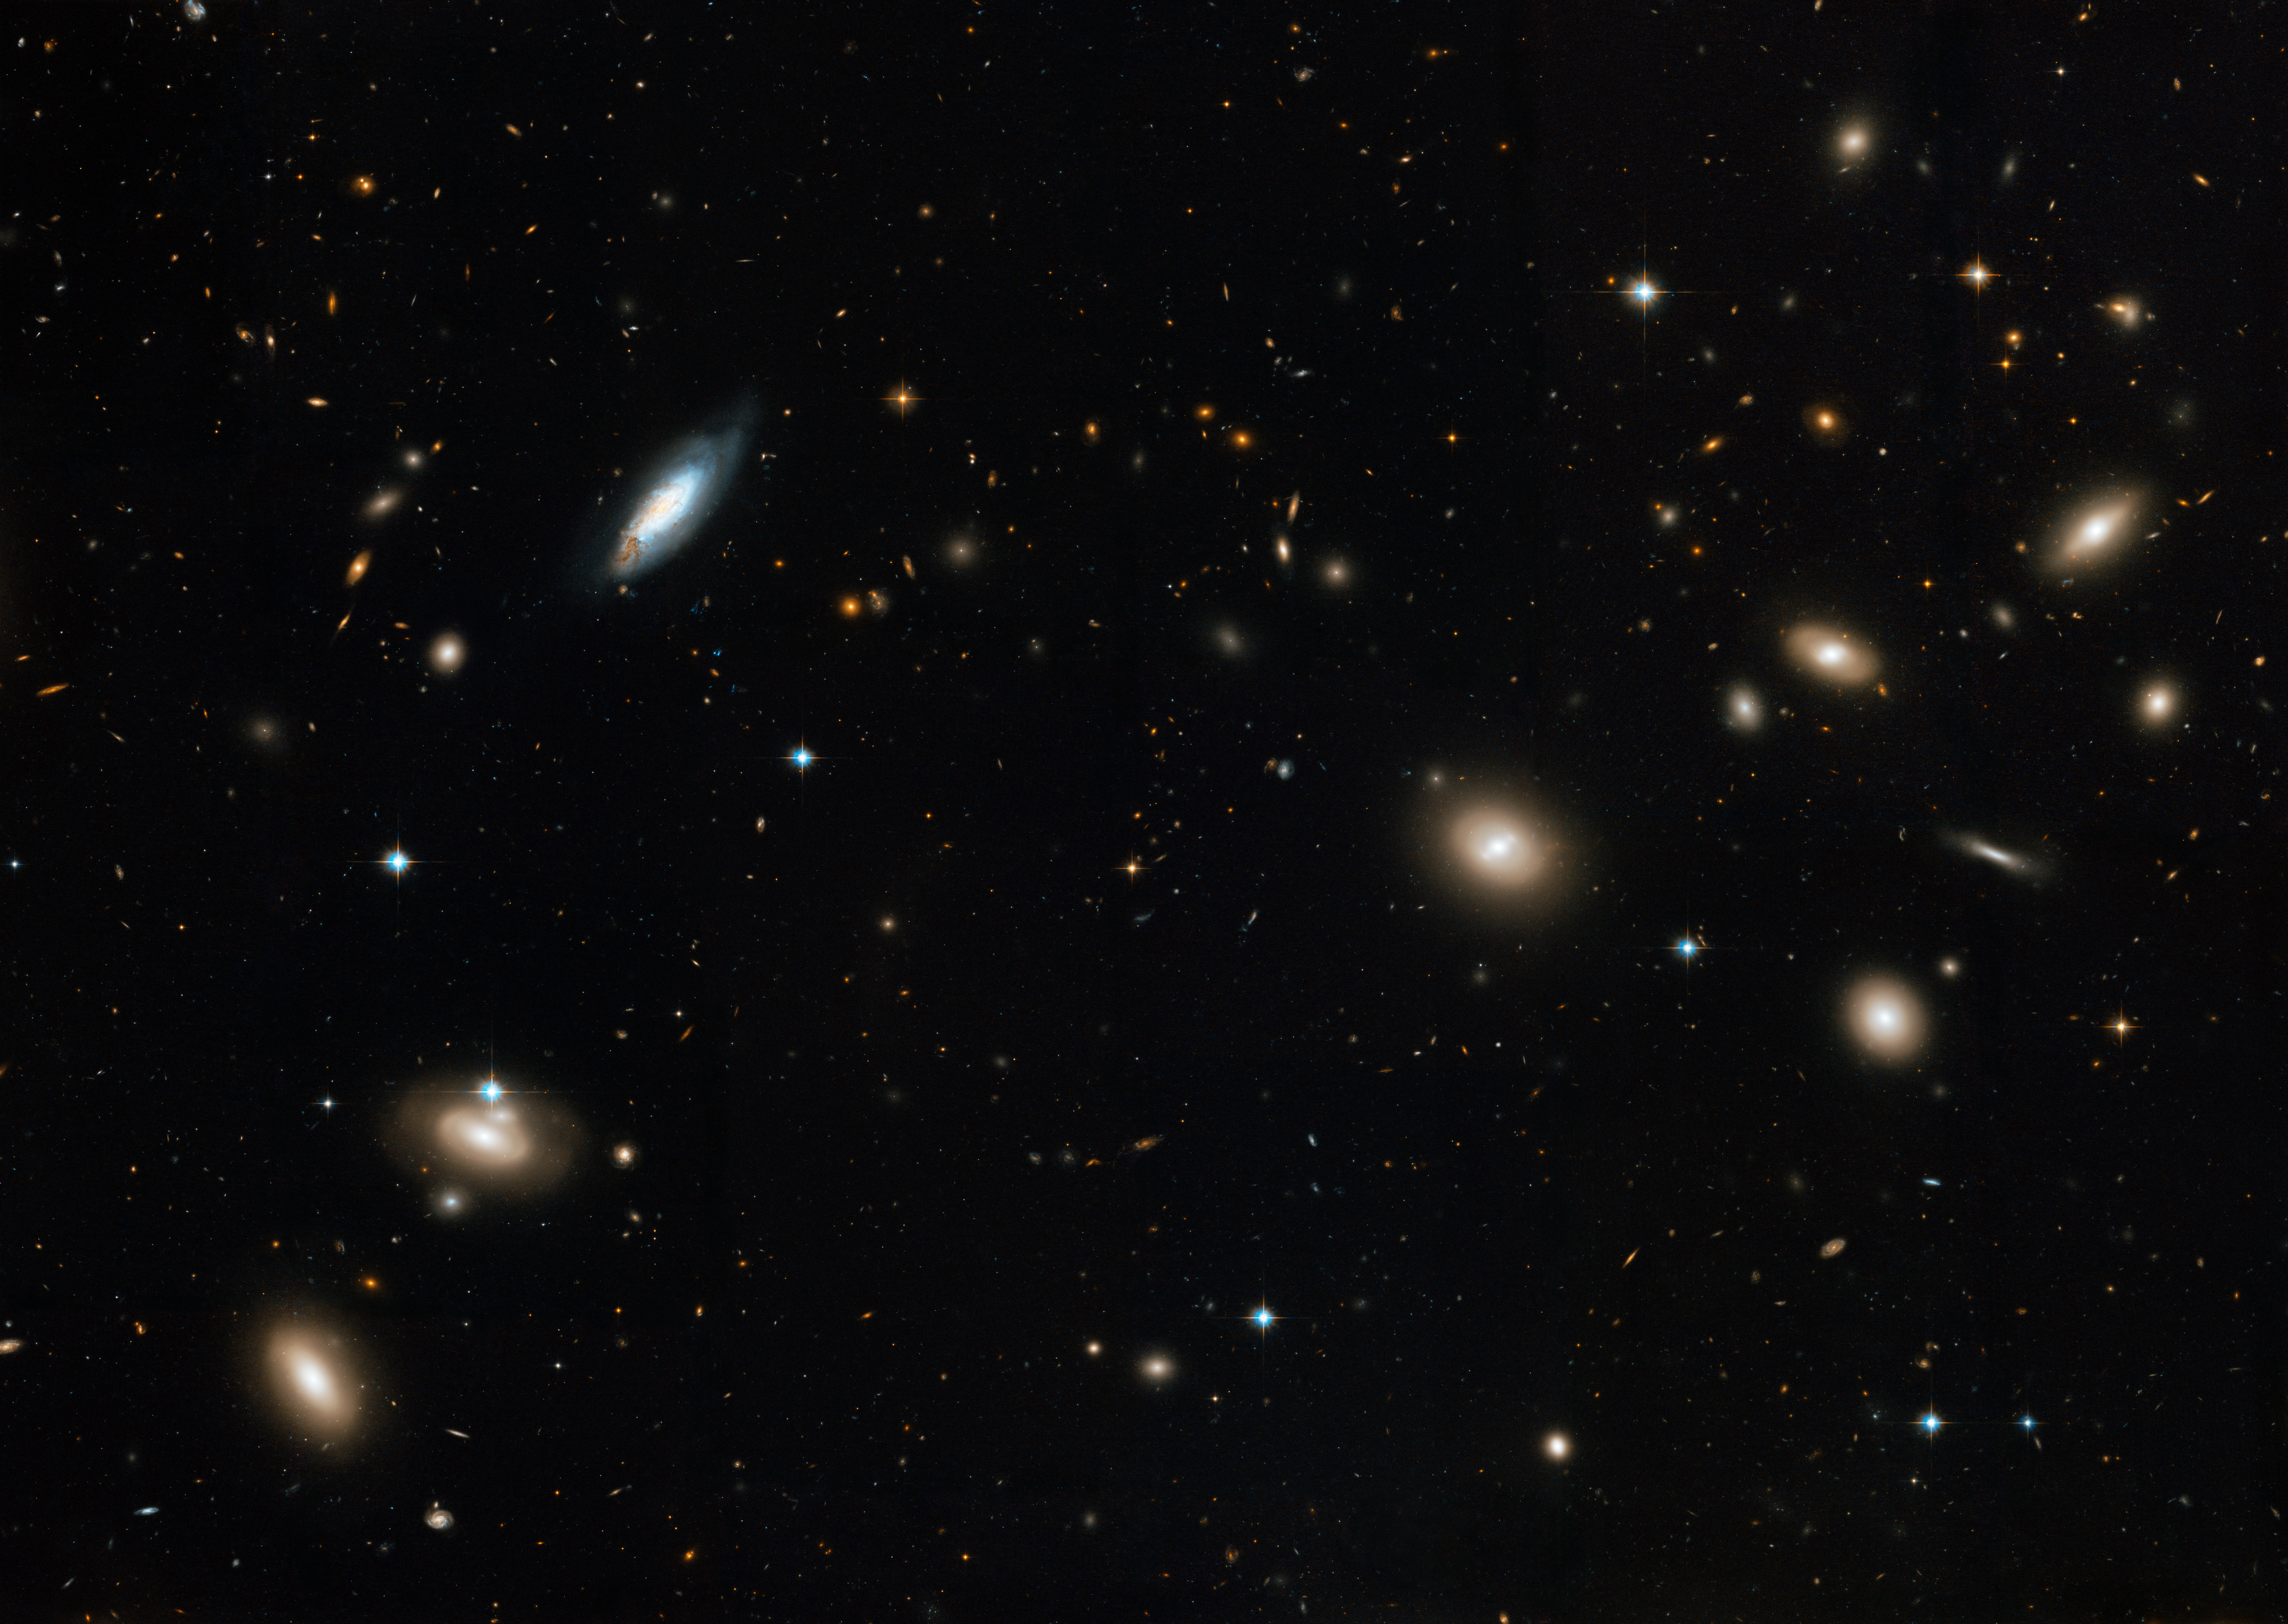

The Coma Galaxy Cluster as seen by Hubble

Hubble's Advanced Camera for Surveys has viewed a large portion of the Coma Cluster, stretching across several million light-years across. The entire spherical cluster is more than 20 million light-years in diameter and contains thousands of galaxies.

Most of the galaxies that inhabit the central portion of the Coma Cluster are elliptical galaxies. These featureless "fuzz-balls" are a pale golden brown in colour and contain populations of old stars. Both dwarf and giant ellipticals are found in abundance in the Coma Cluster.

Credit: NASA, ESA, and the Hubble Heritage Team (STScI/AURA). Acknowledgment: D. Carter (Liverpool John Moores University) and the Coma HST ACS Treasury Team.